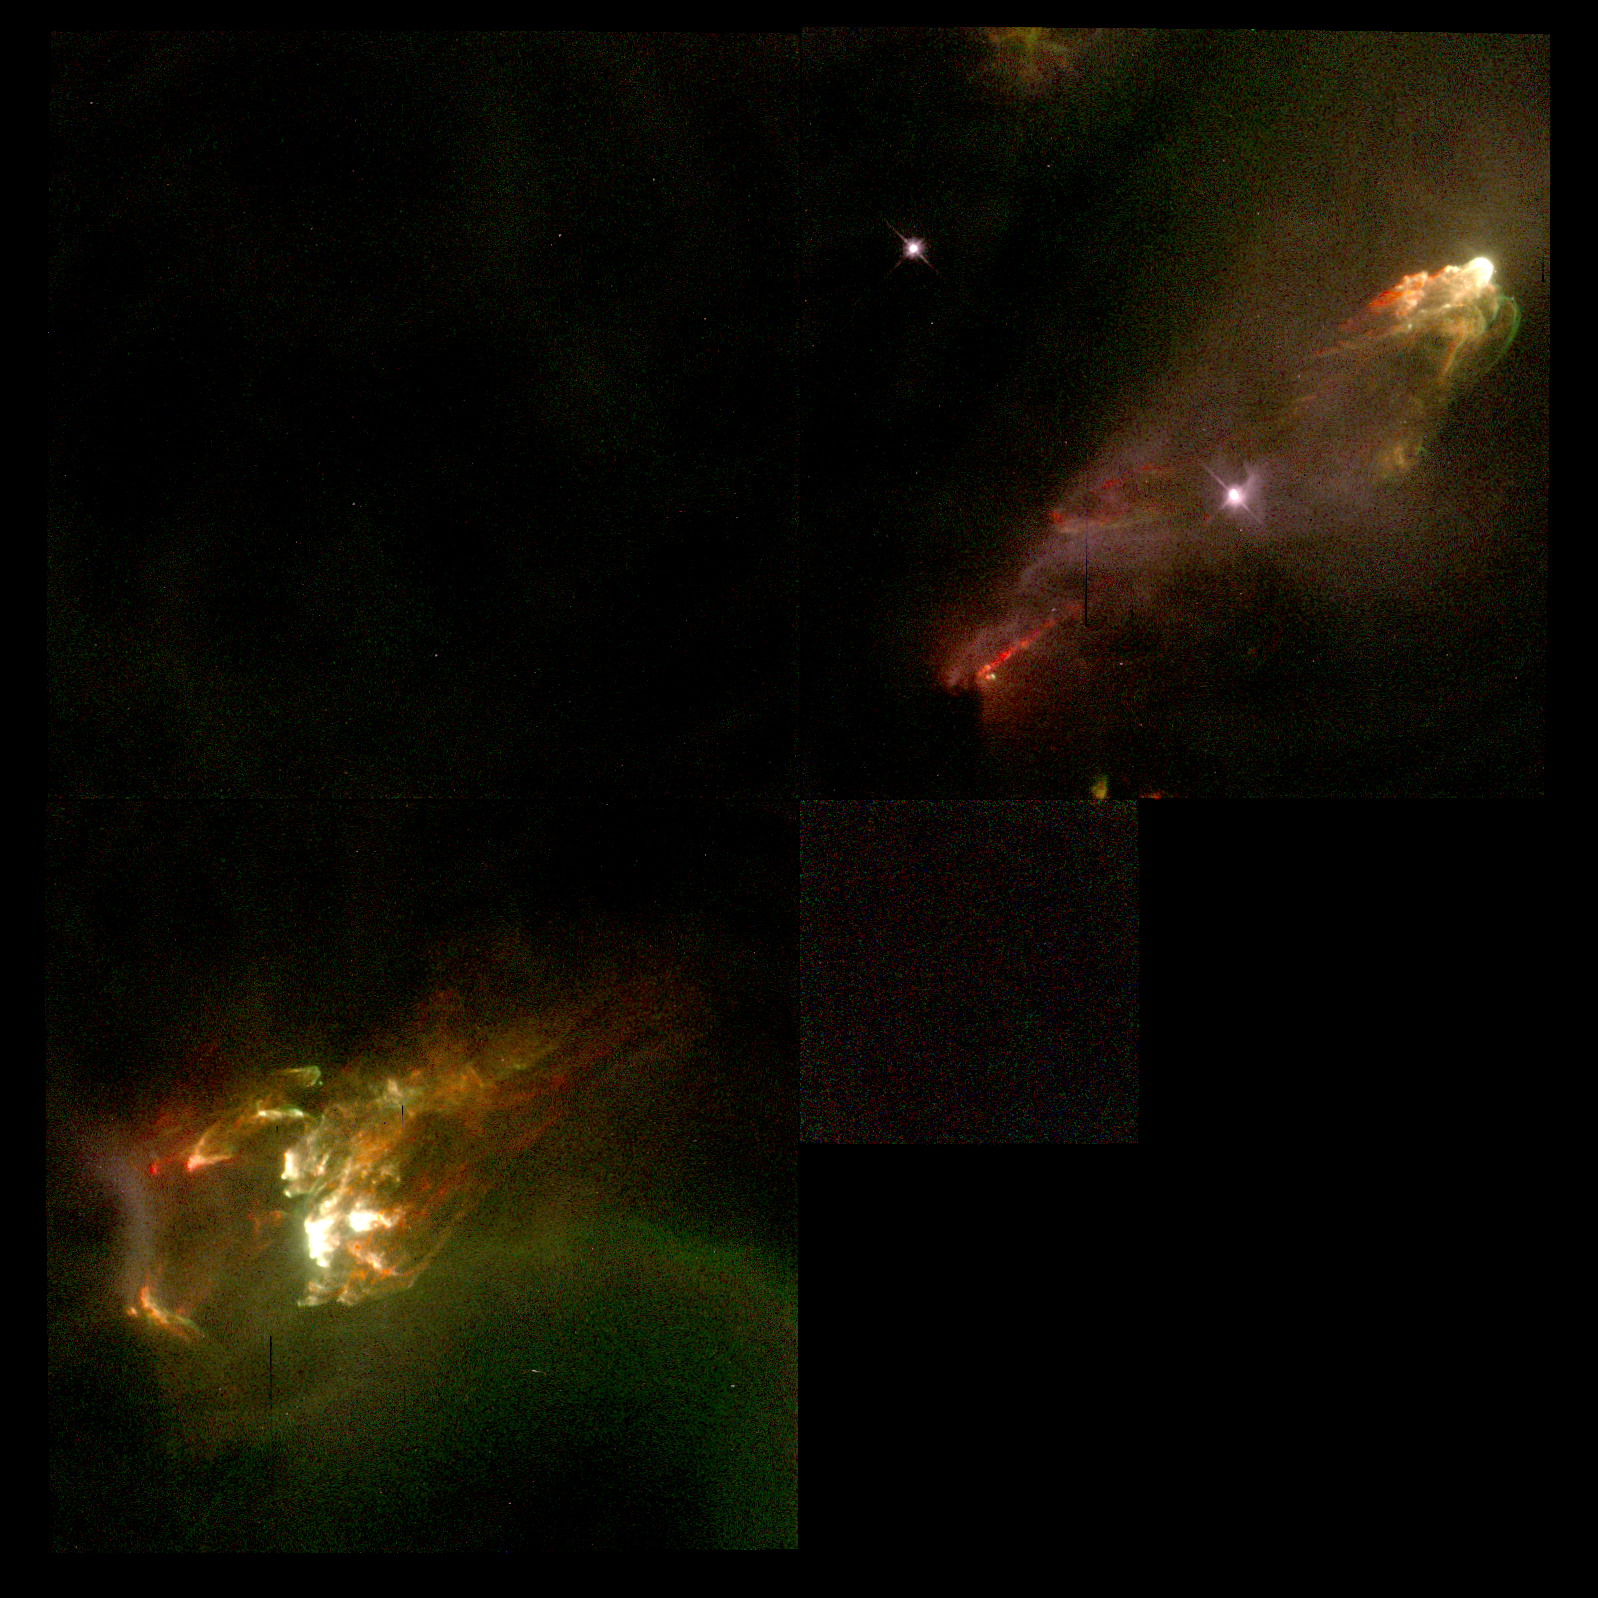

Jet from Young Star

Tip to tip, this jet spans slightly more than a light-year. The fountainhead of this structure - the young star - lies midway between the jet, and is hidden from view behind a dark cloud of dust. The nearly symmetrical blobs of gas at either end are where the jet has slammed into interstellar gas.

Credit: J. Hester (Arizona State University), the WFPC 2 Investigation Definition Team, and NASA/ESA